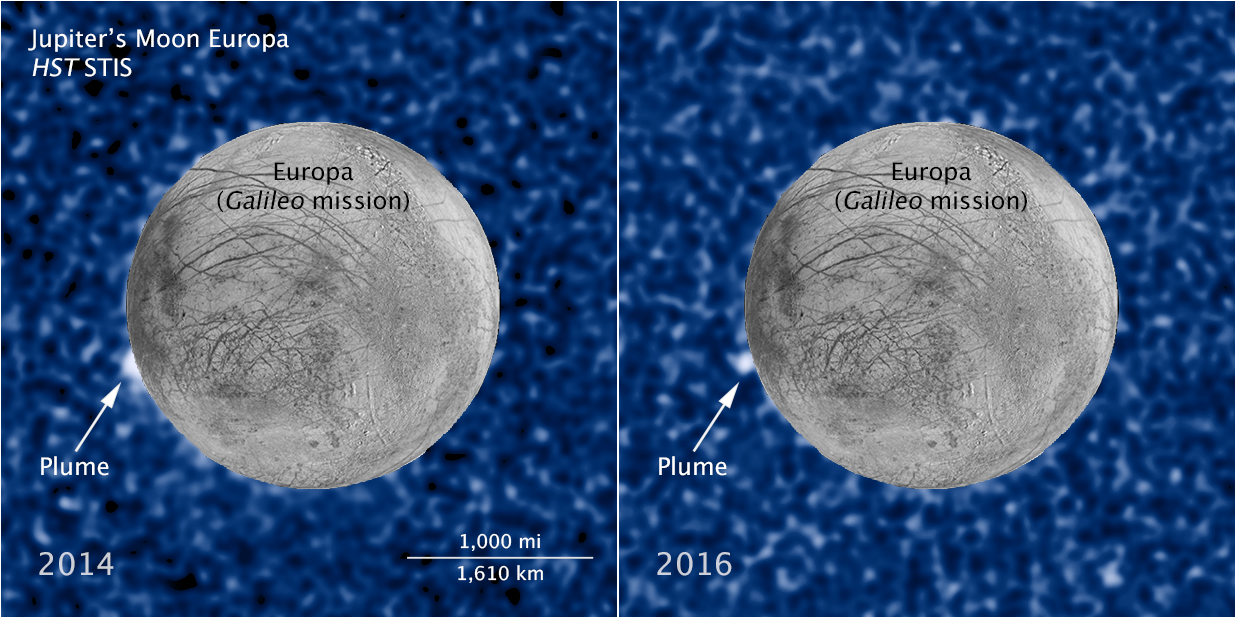

Hubble sees recurring plume erupting from Europa (annotated)

These composite images show a suspected plume of material erupting two years apart from the same location on Jupiter's icy moon Europa. The images bolster evidence that the plumes are a real phenomenon, flaring up intermittently in the same region on the satellite.

Both plumes, photographed in ultraviolet light by the NASA/ESA Hubble Space Telescope, were seen in silhouette as the moon passed in front of Jupiter.

The newly imaged plume, shown at right, rises about 100 kilometres above Europa's frozen surface. The image was taken on 22 February 2016. The plume in the image at left, observed by Hubble on 17 March 2014, originates from the same location. It is estimated to be about 40 kilometres high. The snapshot of Europa, superimposed on the Hubble image, was assembled from data from NASA's Galileo mission to Jupiter.

The plumes correspond to the location of an unusually warm spot on the moon's icy crust, seen in the late 1990s by the Galileo spacecraft. Researchers speculate that this might be circumstantial evidence for water venting from the moon's subsurface. The material could be associated with the global ocean that is believed to be present beneath the frozen crust.

Credit: NASA, ESA, W. Sparks (STScI), and the USGS Astrogeology Science Center